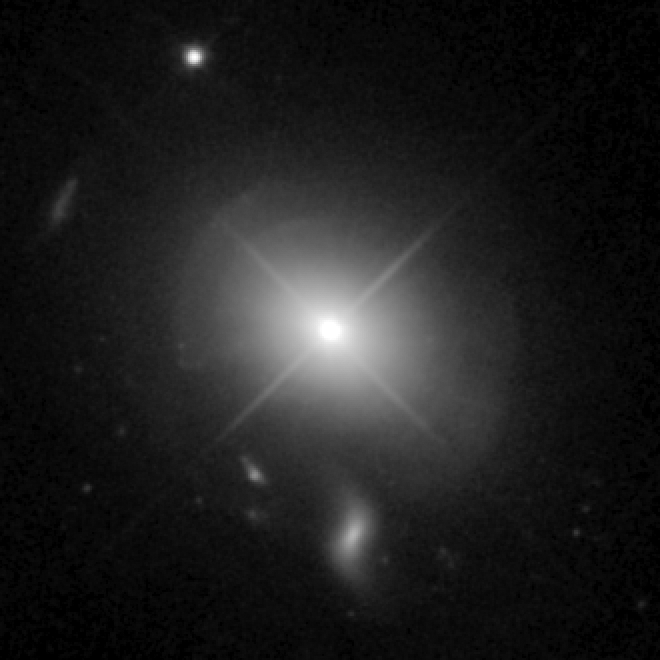

Quasar MC2 1635+119

This image taken by Hubble shows the quasar MC2 1635+119. The quasar sits in an indisturbed elliptical galaxy which shows a shell structure indicating a recent merger. An intermediate population of stars is dominating the galaxy and probably the result of a strong star burst at the time of the merging process.

Credit: NASA, ESA, and G. Canalizo (University of California, Riverside)